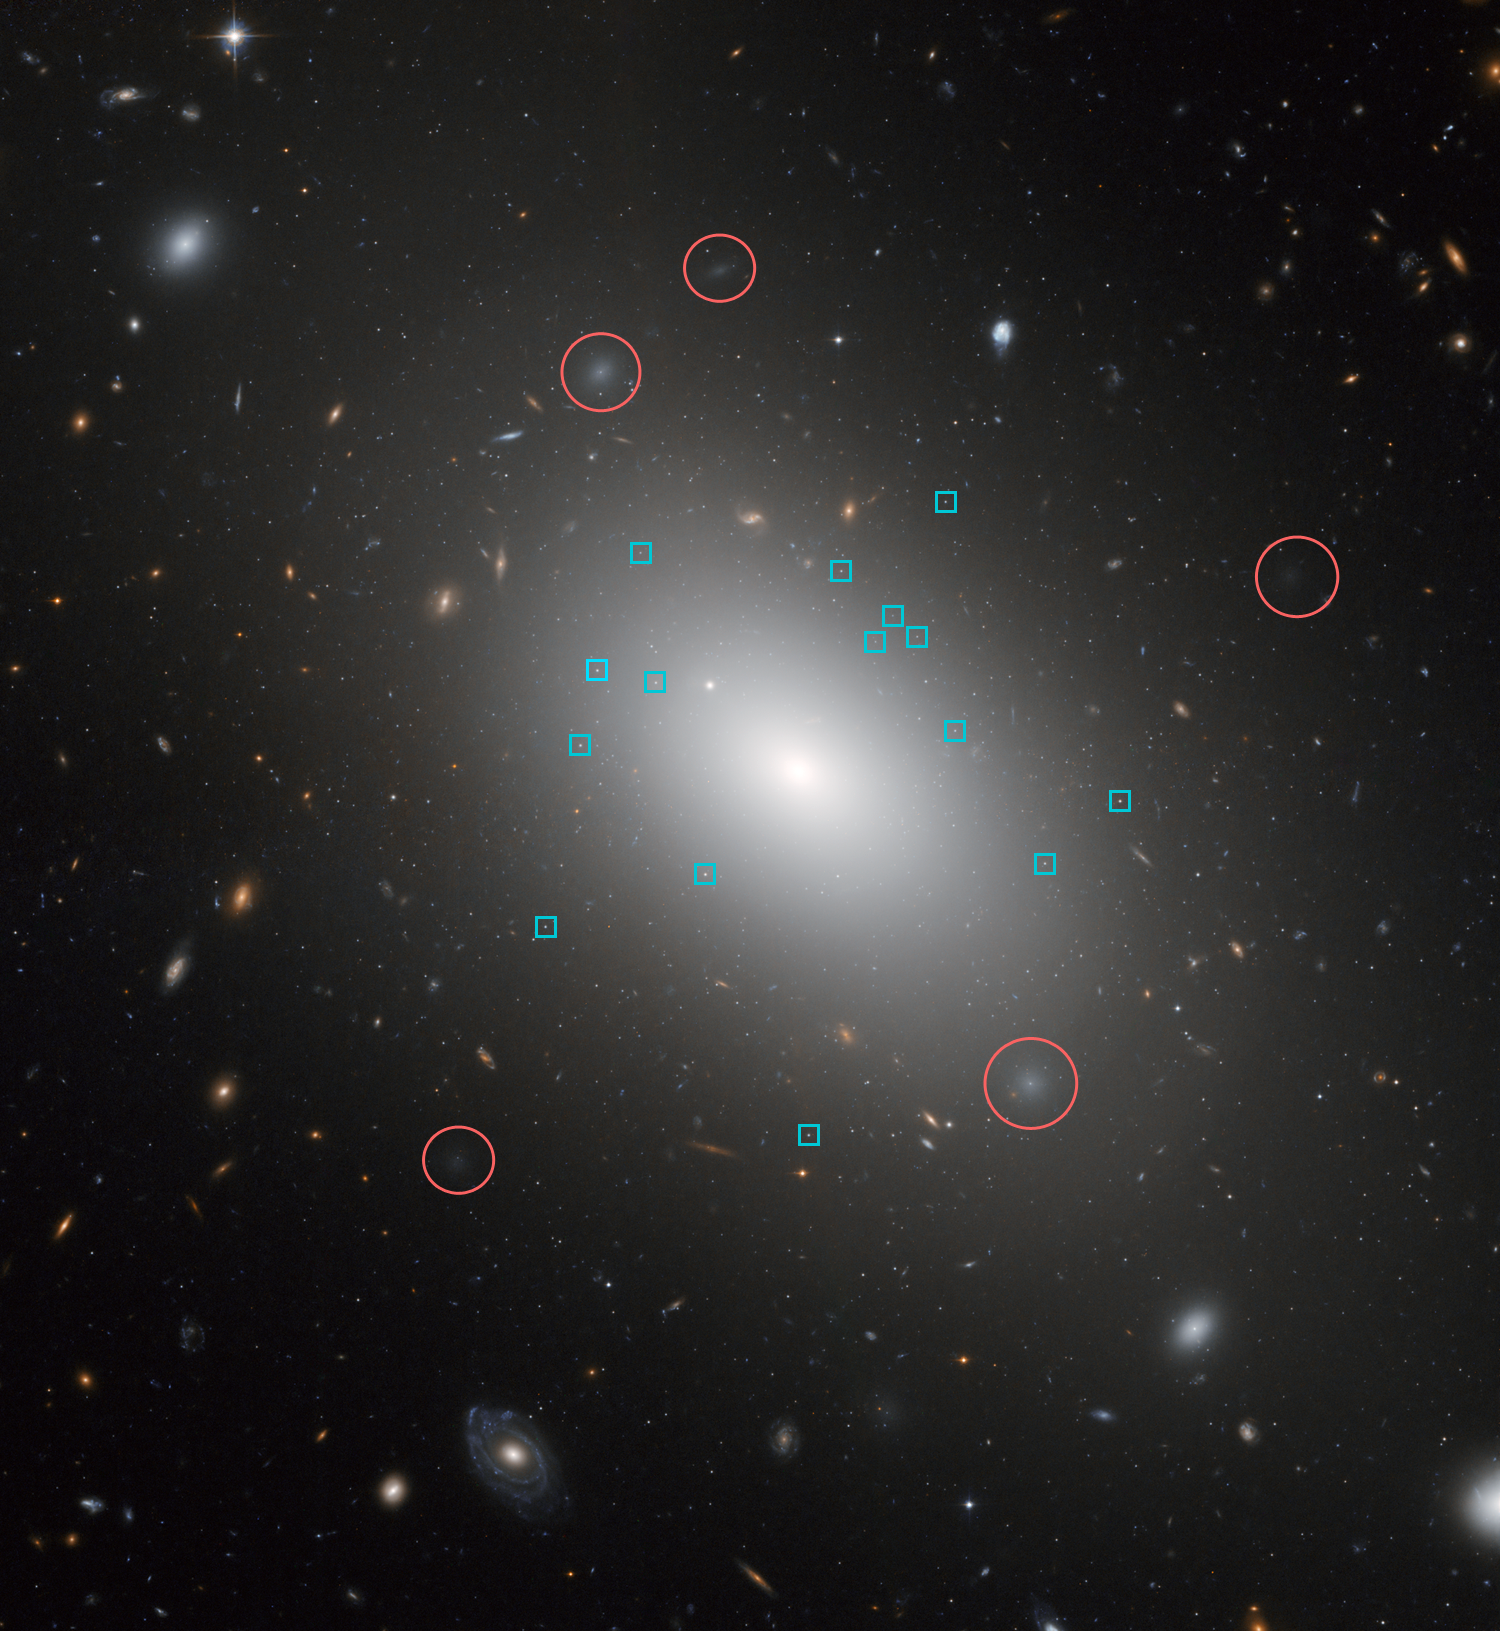

Annotated Hubble image of NGC 1132

This Hubble image shows the giant elliptical galaxy NGC 1132 with annotations showing some of the surrounding dwarf galaxies (in red) and some of its numerous globular clusters (in blue).

NGC 1132, together with the small dwarf galaxies surrounding it, are dubbed a "fossil group" as they are most likely the remains of a group of galaxies that merged together in the recent past.

NGC 1132 is surrounded by thousands of ancient globular clusters, swarming around the galaxy like bees around a hive. These globular clusters are likely to be the survivors of the disruption of their cannibalised parent galaxies that have been eaten by NGC 1132 and may reveal its merger history. In the background, there is a stunning tapestry of numerous galaxies that are much further away.

Credit: NASA, ESA and the Hubble Heritage (STScI/AURA)-ESA/Hubble Collaboration. Acknowledgment: M. West (ESO, Chile)